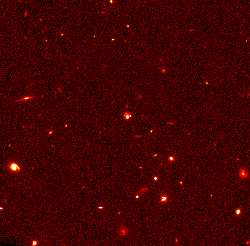

Distant Supernova 1997cj

These supernovae belong to a class called Type Ia, which are considered reliable distance indicators. Looking at great distances also means looking back in time because of the finite velocity of light.

Credit: Peter Garnavich, Harvard-Smithsonian Center for Astrophysics, the High-z Supernova Search Team, and NASA/ESA